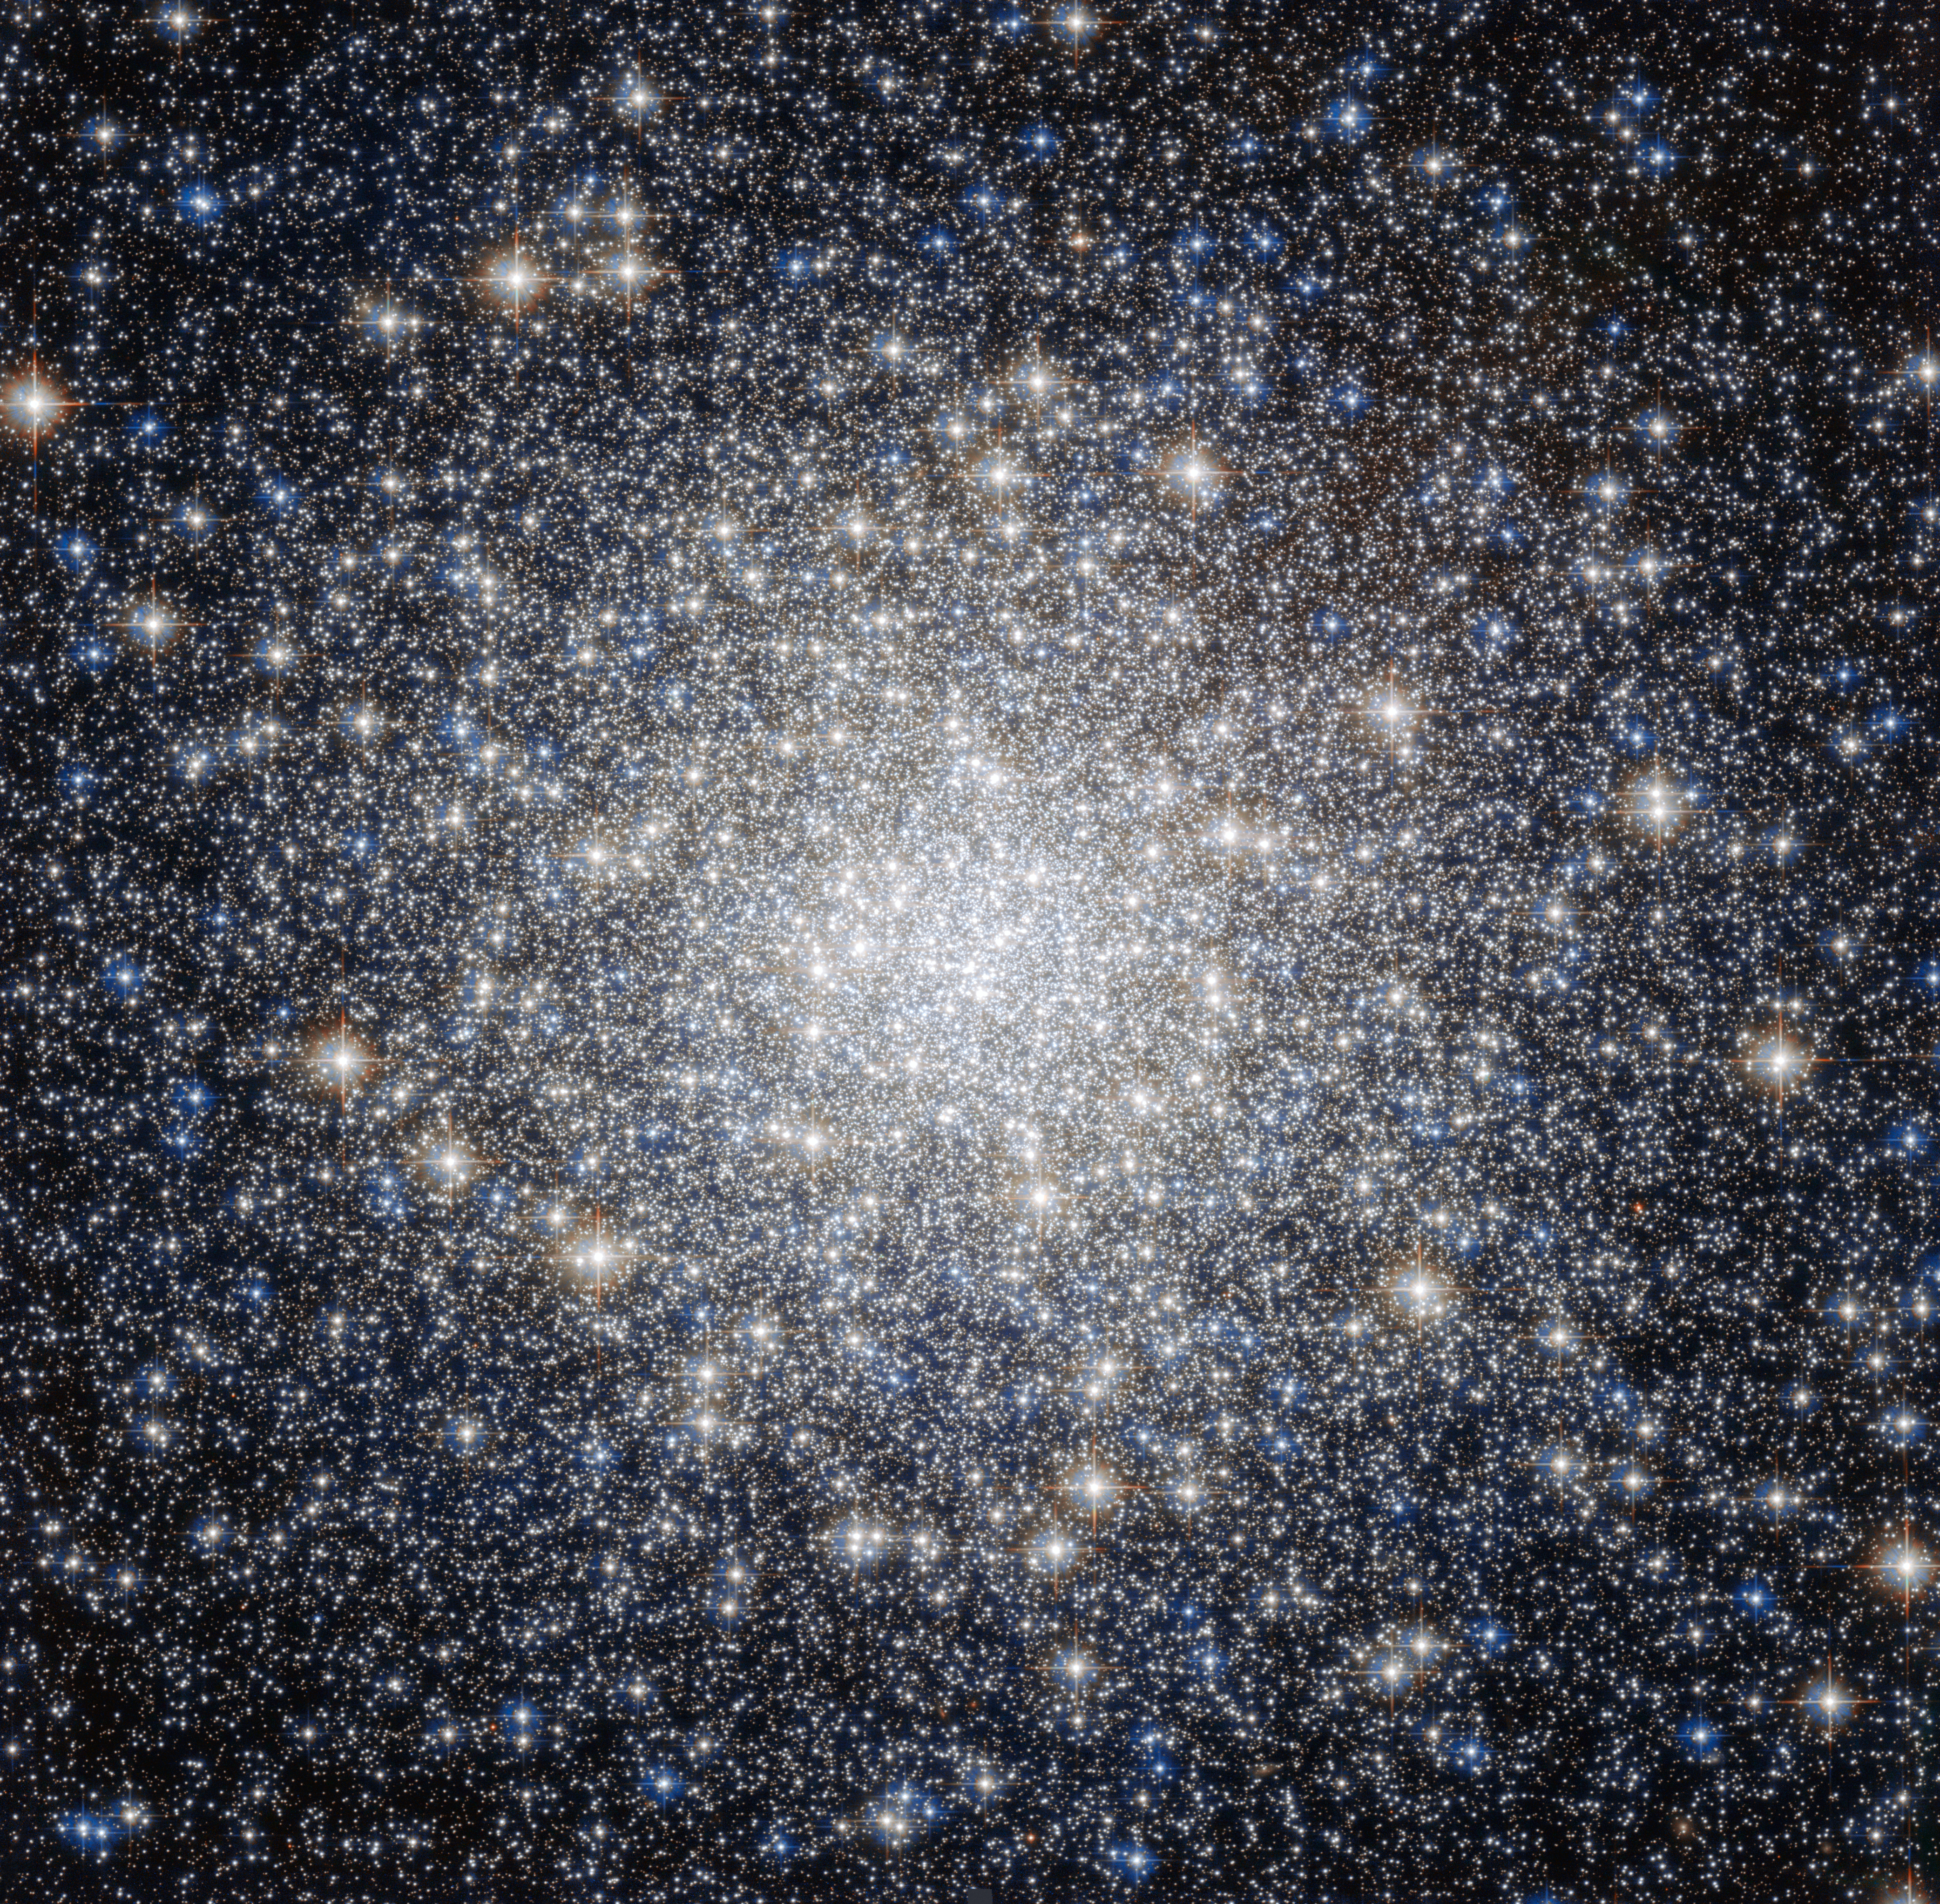

All that glitters

This striking new NASA/ESA Hubble Space Telescope image shows a glittering bauble named Messier 92. Located in the northern constellation of Hercules, this globular cluster — a ball of stars that orbits a galactic core like a satellite — was first discovered by astronomer Johann Elert Bode in 1777.

Messier 92 is one of the brightest globular clusters in the Milky Way, and is visible to the naked eye under good observing conditions. It is very tightly packed with stars, containing some 330 000 stars in total. As is characteristic of globular clusters, the predominant elements within Messier 92 are hydrogen and helium, with only traces of others. It is actually what is known as an Oosterhoff type II (OoII) globular cluster, meaning that it belongs to a group of metal-poor clusters — to astronomers, metals are all elements heavier than hydrogen and helium.

By exploring the composition of globulars like Messier 92, astronomers can figure out how old these clusters are. As well as being bright, Messier 92 is also old, being one of the oldest star clusters in the Milky Way, with an age almost the same as the age of the Universe.

A version of this image was entered into the Hubble’s Hidden Treasures image processing competition by contestant Gilles Chapdelaine.

Credit: ESA/Hubble & NASA Acknowledgement: Gilles Chapdelaine